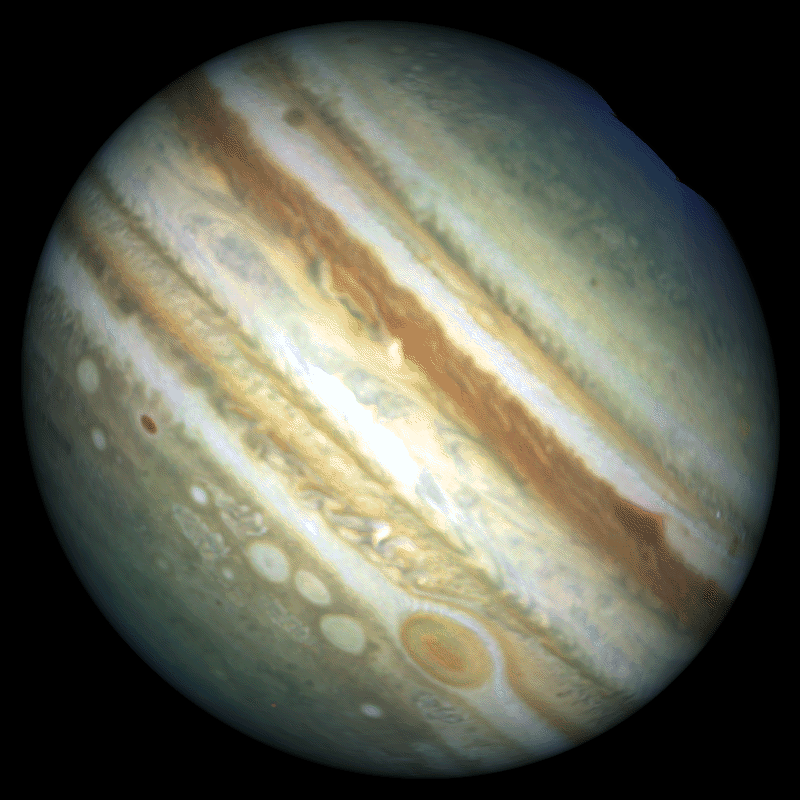

Stormy Weather on Jupiter

Hubble Space Telescope is following dramatic and rapid changes in Jupiter's turbulent atmosphere that will be critical for targeting observations made by the Galileo space probe when it arrives at the giant planet later this year.

This Hubble image provides a detailed look at a unique cluster of three white oval-shaped storms that lie southwest (below and to the left) of Jupiter's Great Red Spot.

Credit: Reta Beebe, Amy Simon (New Mexico State Univ.), and NASA/ESA